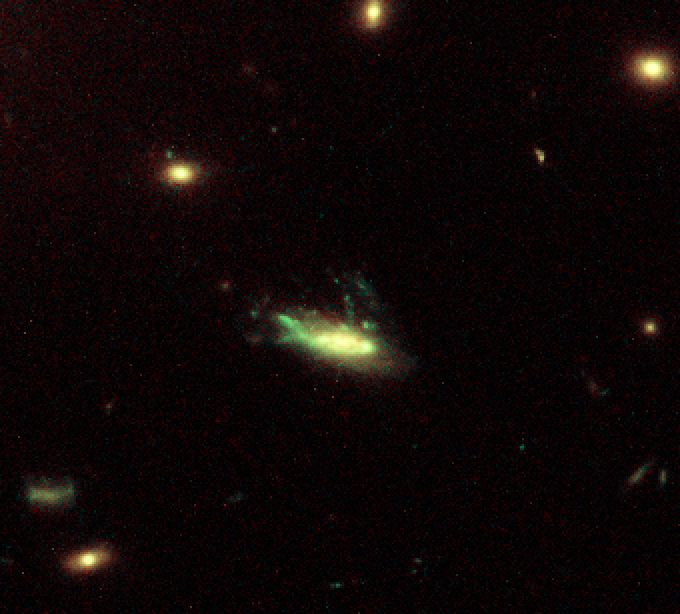

Galaxy C153 in Cluster Abell 2125 in Visible (HST)

Trailing 200,000-light-year-long streamers of seething gas, a galaxy that was once like our Milky Way is being shredded as it plunges at 4.5 million miles per hour through the heart of a distant cluster of galaxies. In this unusually violent collision with ambient cluster gas, the galaxy is stripped down to its skeletal spiral arms as it is eviscerated of fresh hydrogen for making new stars.

Credit: F. Owen (NRAO), W. Keel (U. AL), M. Ledlow (Gemini Obs.), G. Morrison (UNM), V. Andersen (U. AL)